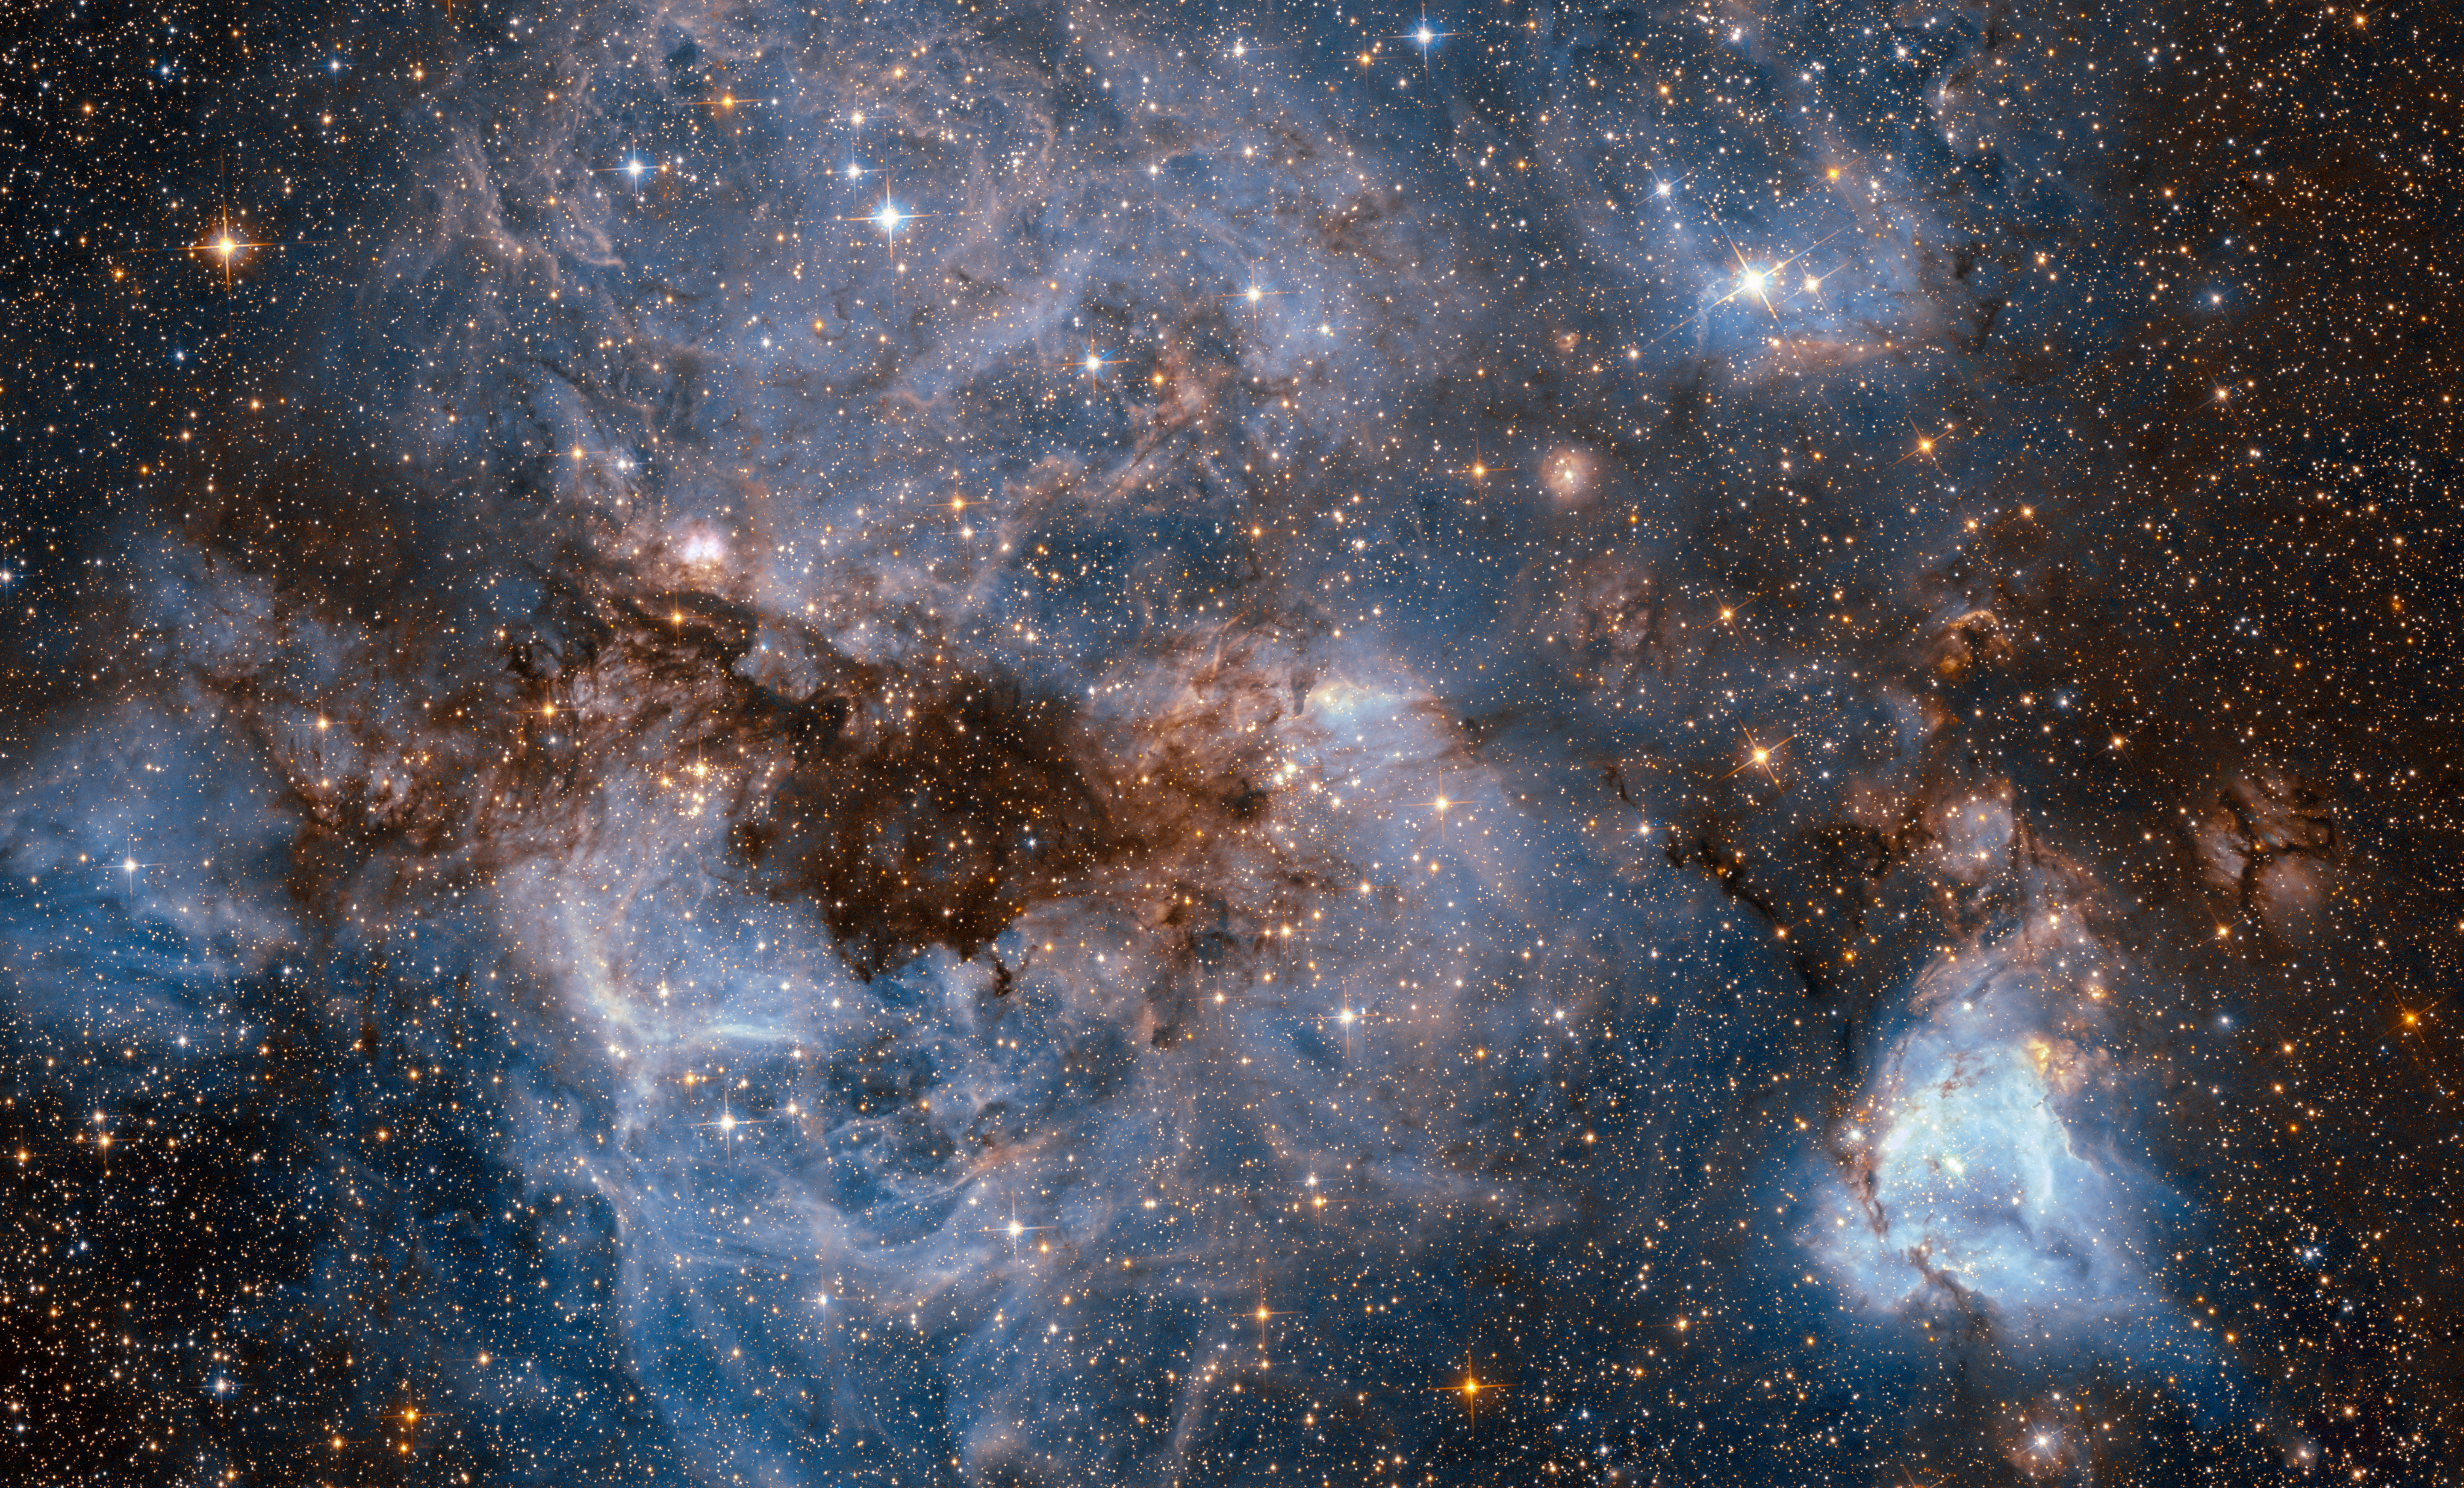

Into the storm

This shot from the NASA/ESA Hubble Space Telescope shows a maelstrom of glowing gas and dark dust within one of the Milky Way’s satellite galaxies, the Large Magellanic Cloud (LMC).

This stormy scene shows a stellar nursery known as N159, an HII region over 150 light-years across. N159 contains many hot young stars. These stars are emitting intense ultraviolet light, which causes nearby hydrogen gas to glow, and torrential stellar winds, which are carving out ridges, arcs, and filaments from the surrounding material.

At the heart of this cosmic cloud lies the Papillon Nebula, a butterfly-shaped region of nebulosity. This small, dense object is classified as a High-Excitation Blob, and is thought to be tightly linked to the early stages of massive star formation.

N159 is located over 160 000 light-years away. It resides just south of the Tarantula Nebula (heic1402), another massive star-forming complex within the LMC. It was previously imaged by Hubble’s Wide Field Planetary Camera 2, which also resolved the Papillon Nebula for the first time.

Credit: ESA/Hubble & NASA